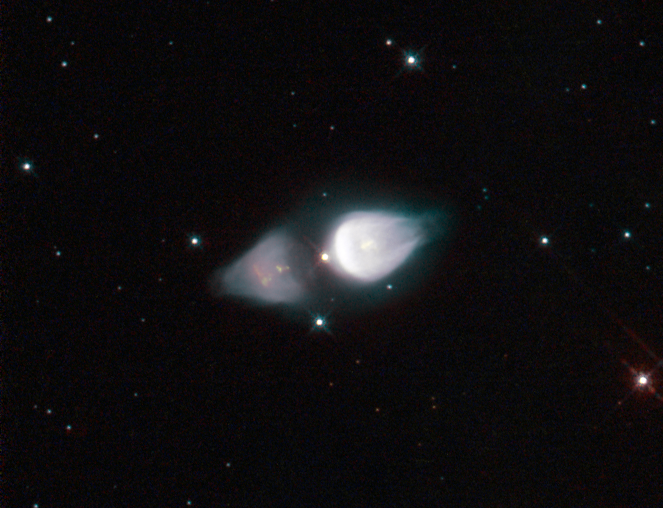

Rare cosmic footprint

The NASA/ESA Hubble Space Telescope has been used to capture a striking image of a rare astronomical phenomenon called a protoplanetary nebula. This particular example, called Minkowski’s Footprint, also known as Minkowski 92, features two vast onion-shaped structures either side of an ageing star, giving it a very distinctive shape.

Protoplanetary nebulae like Minkowski’s Footprint have short lives, being a preliminary stage to the more common planetary nebula phase. In the middle of the image is a star, soon to be a white dwarf, puffing out material due to intense surface pulsations. Charged particle streams, called stellar winds, are shaping this gas into the interesting shapes that Hubble allows us to see.

Technically speaking Minkowski’s Footprint is currently a reflection nebula as it is only visible due to the light reflected from the central star. In a few thousand years the star will get hotter and its ultraviolet radiation will light up the surrounding gas from within, causing it to glow. At this point it will have become a fully fledged planetary nebula.

The processes behind protoplanetary nebulae are not completely understood, making observations such as this even more important. Hubble has already conducted sterling work in this field, and is set to continue.

The image was obtained with the Hubble's Wide Field Planetary Camera 2. The picture has been made from many exposures through four different colour filters. Light from ionised oxygen has been coloured blue (F502N), light passing through a green/yellow filter (F547M) is coloured cyan, light from atomic oxygen is coloured yellow (F631N) and light from ionised sulphur is coloured red (F673N). The total exposure times per filter were 2080 s, 960 s, 2080 s and 1980 s respectively and the field of view is only about 36 arcseconds across.

Credit: ESA/Hubble & NASA